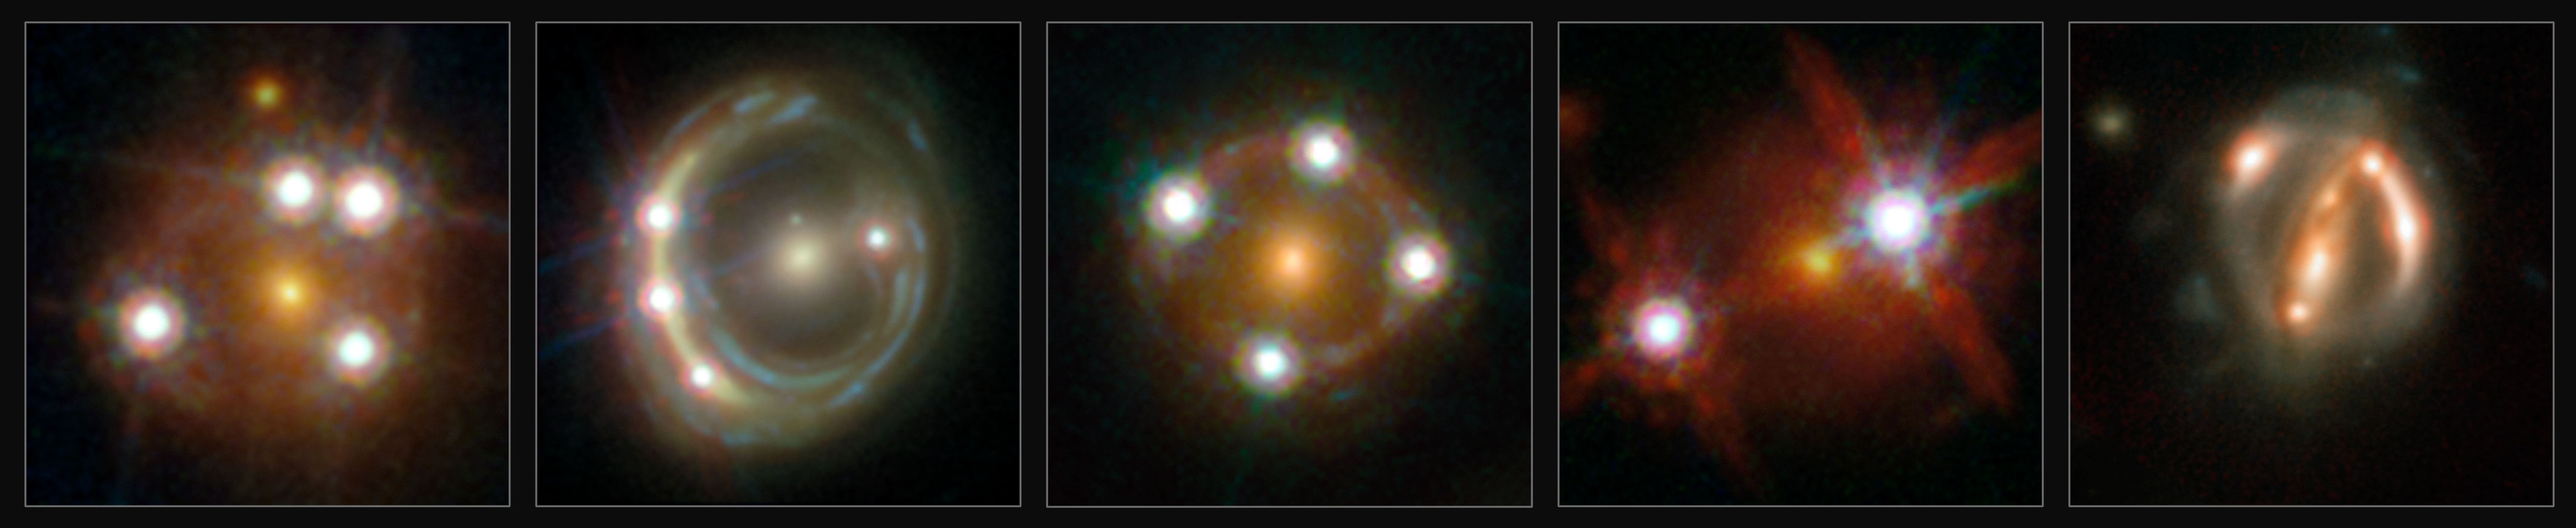

Studied lensed quasars of H0LiCOW collaboration

This montage shows the five lensed quasars and the foreground galaxies studied by the H0LICOW collaboration. Using these objects astronomers were able to make an independent measurement of the Hubble constant. They calculated that the Universe is actually expanding faster than expected on the basis of our cosmological model.

Credit: ESA/Hubble, NASA, Suyu et al.